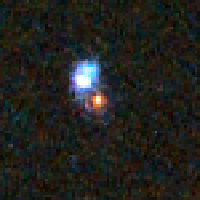

Distant Supernova 1 - After Outburst

Supernovae are extremely luminous and cause a burst of radiation that often briefly outshines an entire galaxy, before fading from view over several weeks or months. During this short interval a supernova can radiate as much energy as the Sun is expected to emit over its entire life span.

Credit: NASA/ESA and A. Riess (STScI)